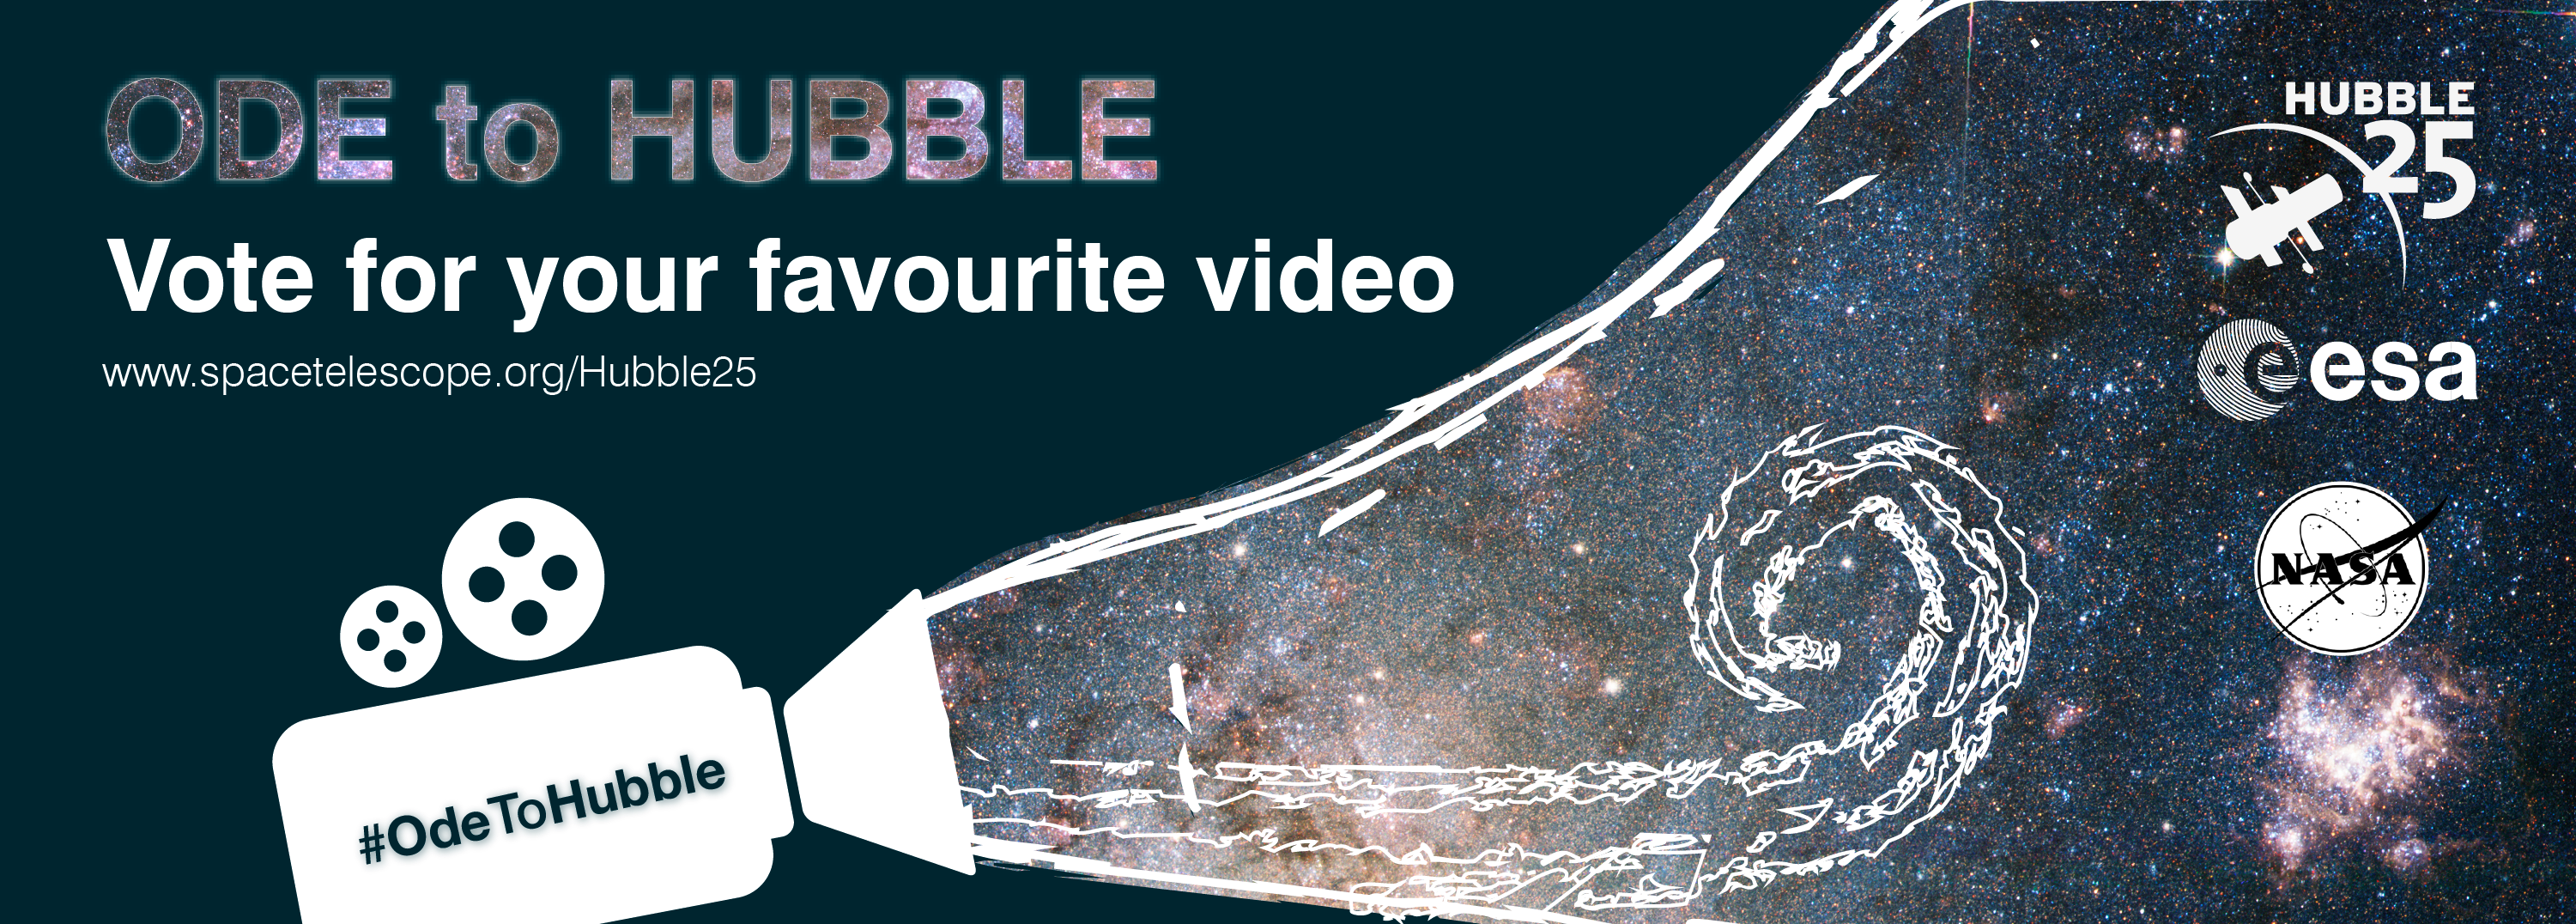

Vote for your favourite ode to Hubble video

A promotional banner for the Ode to Hubble competition. A video competition to celebrate Hubble's 25th year in orbit.

Credit: NASA & ESA